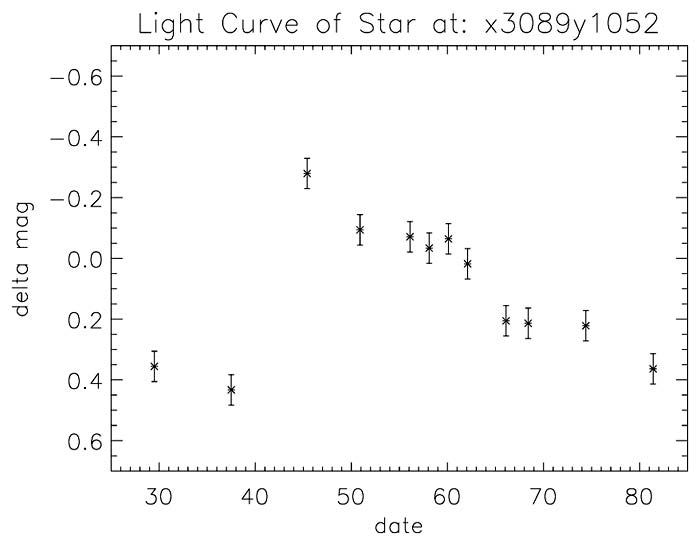

Light curve of Cepheid variable in NGC 3370

A graph showing the relative brightness change of a Cepheid variable in NGC 3370. Peak-to-trough variation represents a doubling in brightness.

Credit: NASA/ESA and A. Riess (STScI)